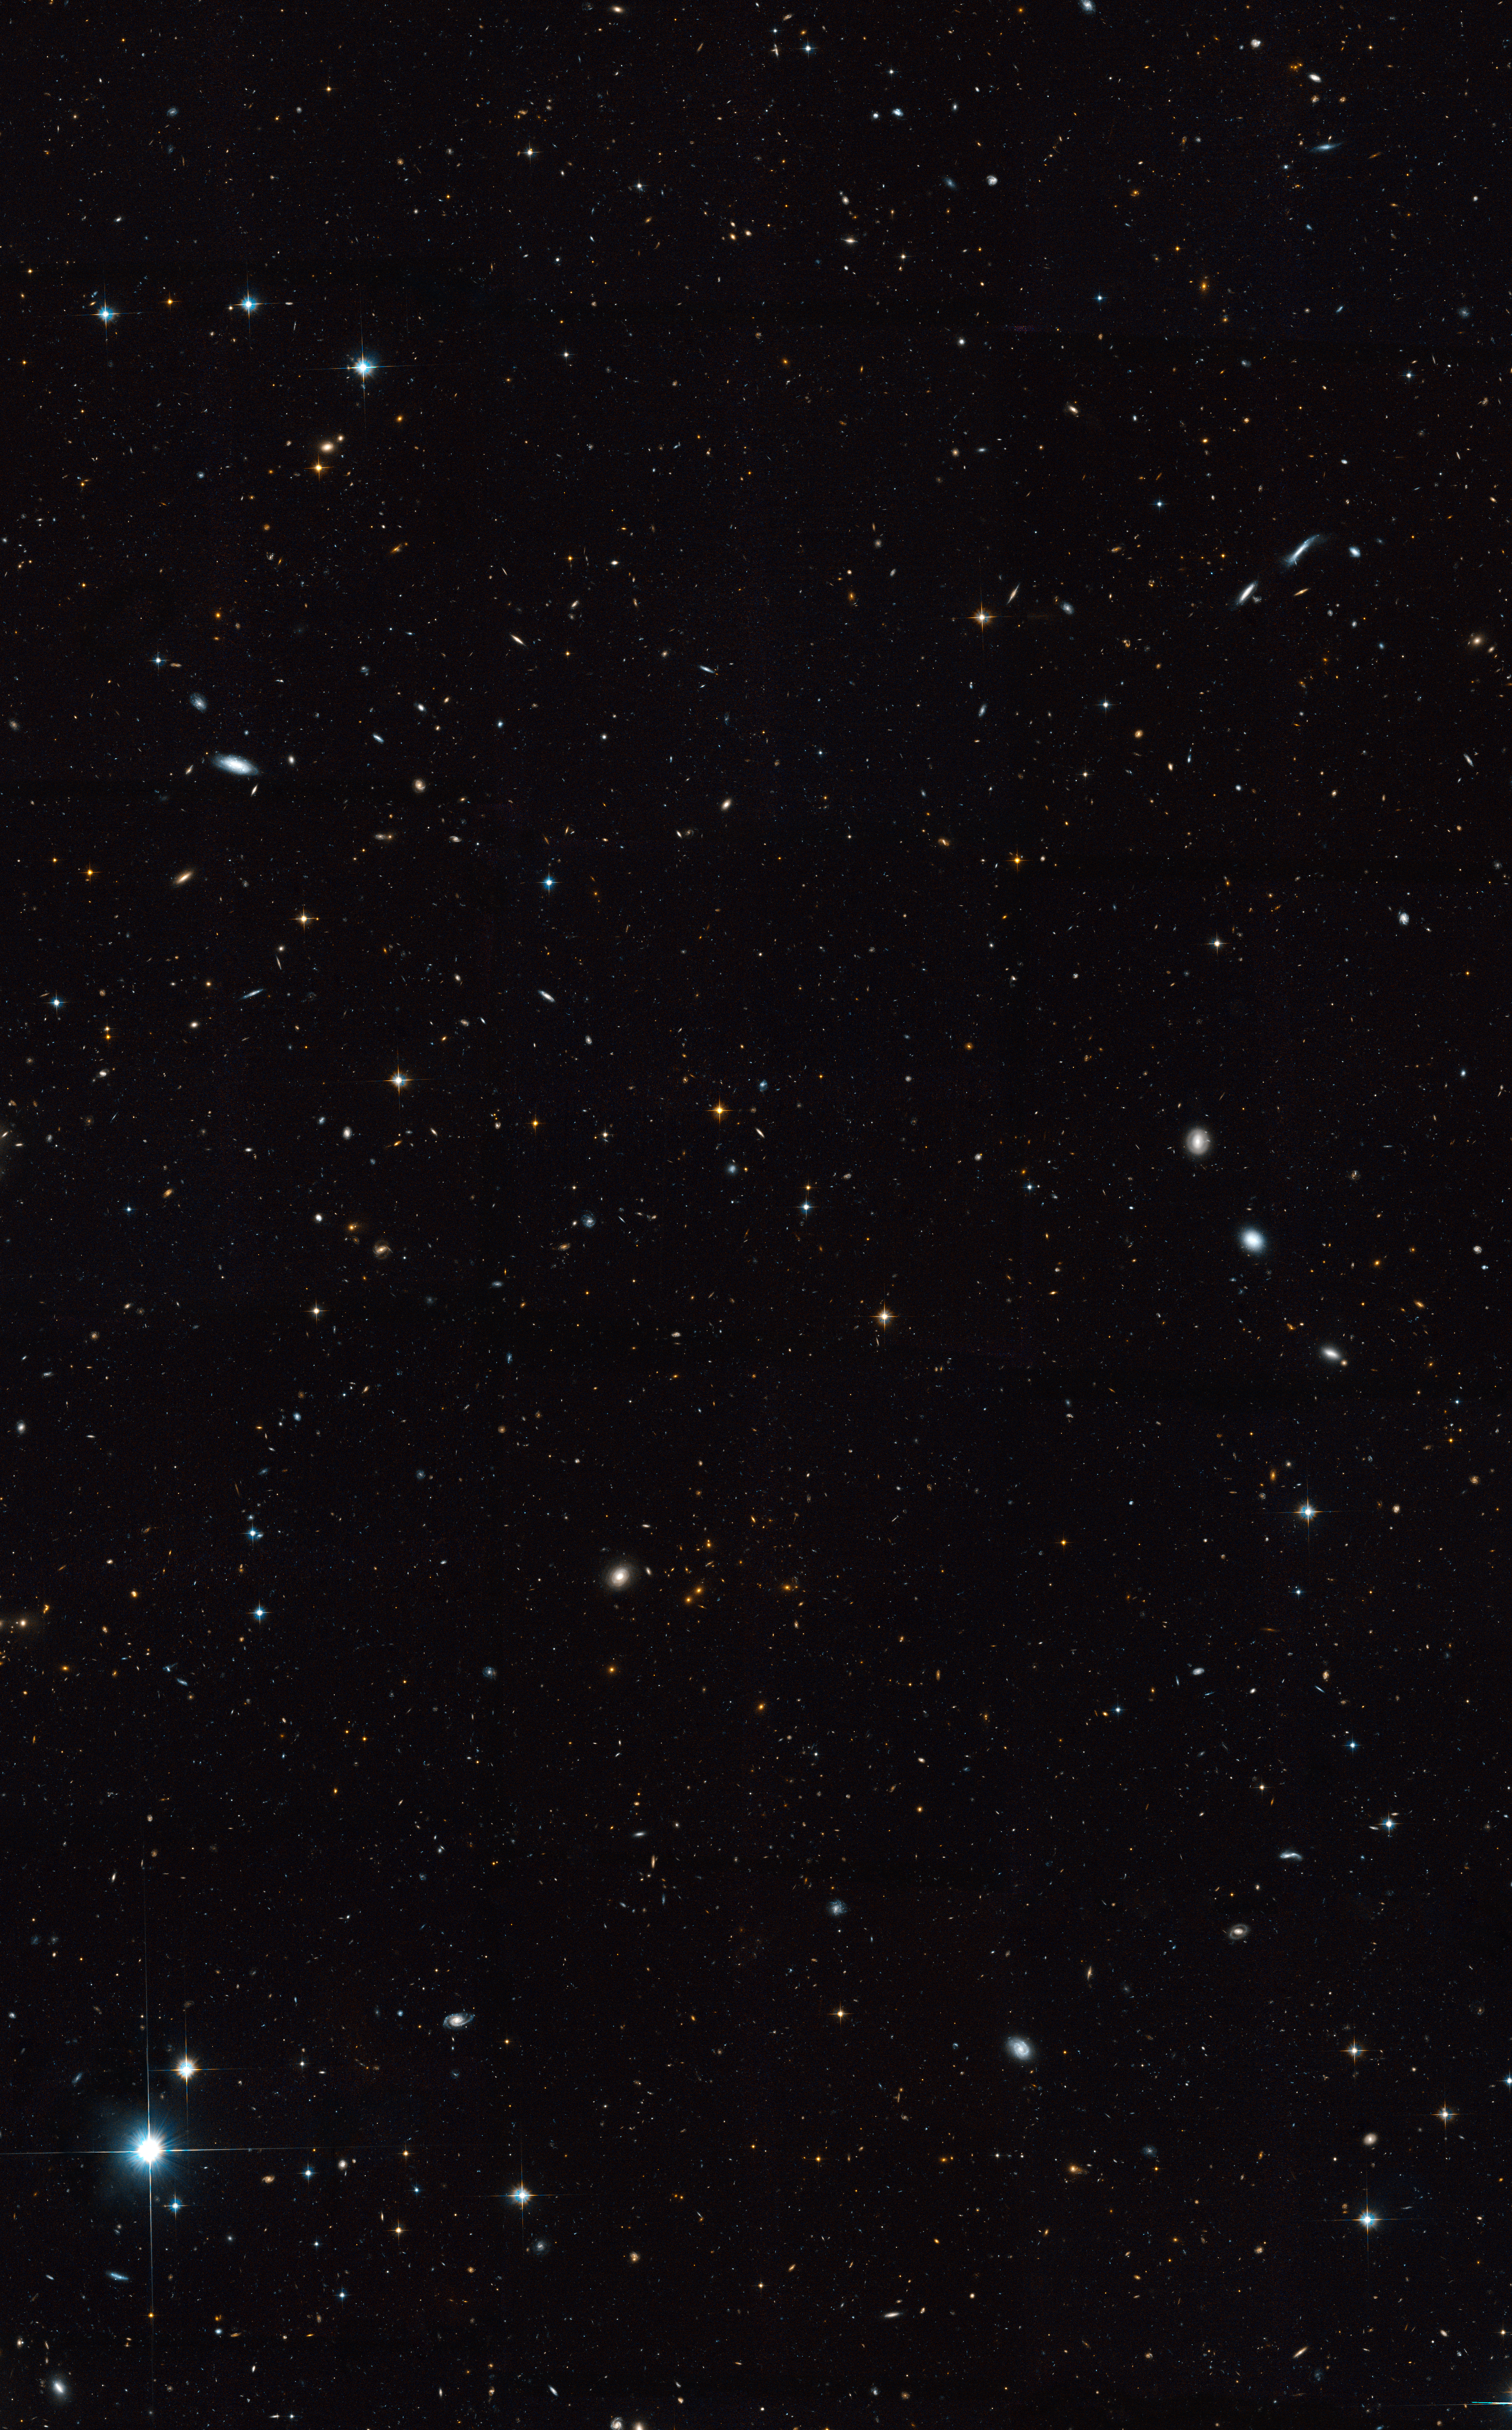

A Sky Flush with Galaxies

This image, taken by NASA/ESA Hubble Space Telescope, represents a small section of a larger panoramic view of the heavens, where at least 50,000 galaxies reside.

Credit: NASA, ESA, M. Davis (University of California, Berkeley), S. Faber (University of California, Santa Cruz), and A. Koekemoer (STScI)